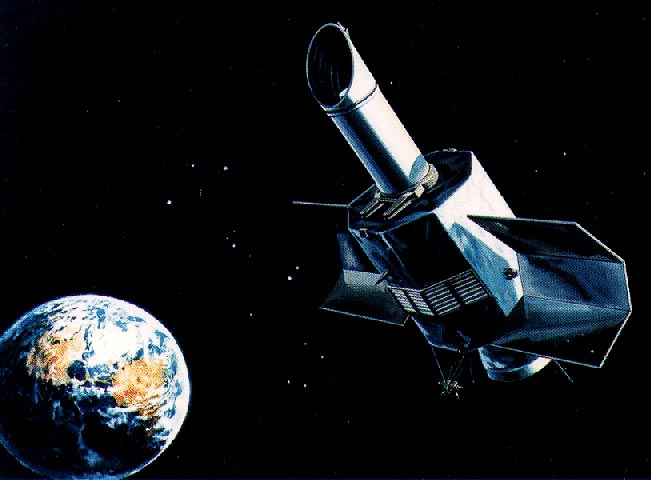

NASA's international ultraviolet explorer

Launched in 1978, the International Ultraviolet Explorer was designed to analyse ultraviolet spectra. It was a joint project between ESA, the UK Science Research Council and NASA.

Credit: Laura Danly (STScI), C. Elise Albert (United States Naval Academy), Kip D. Kuntz (STSCI), NASA, ESA